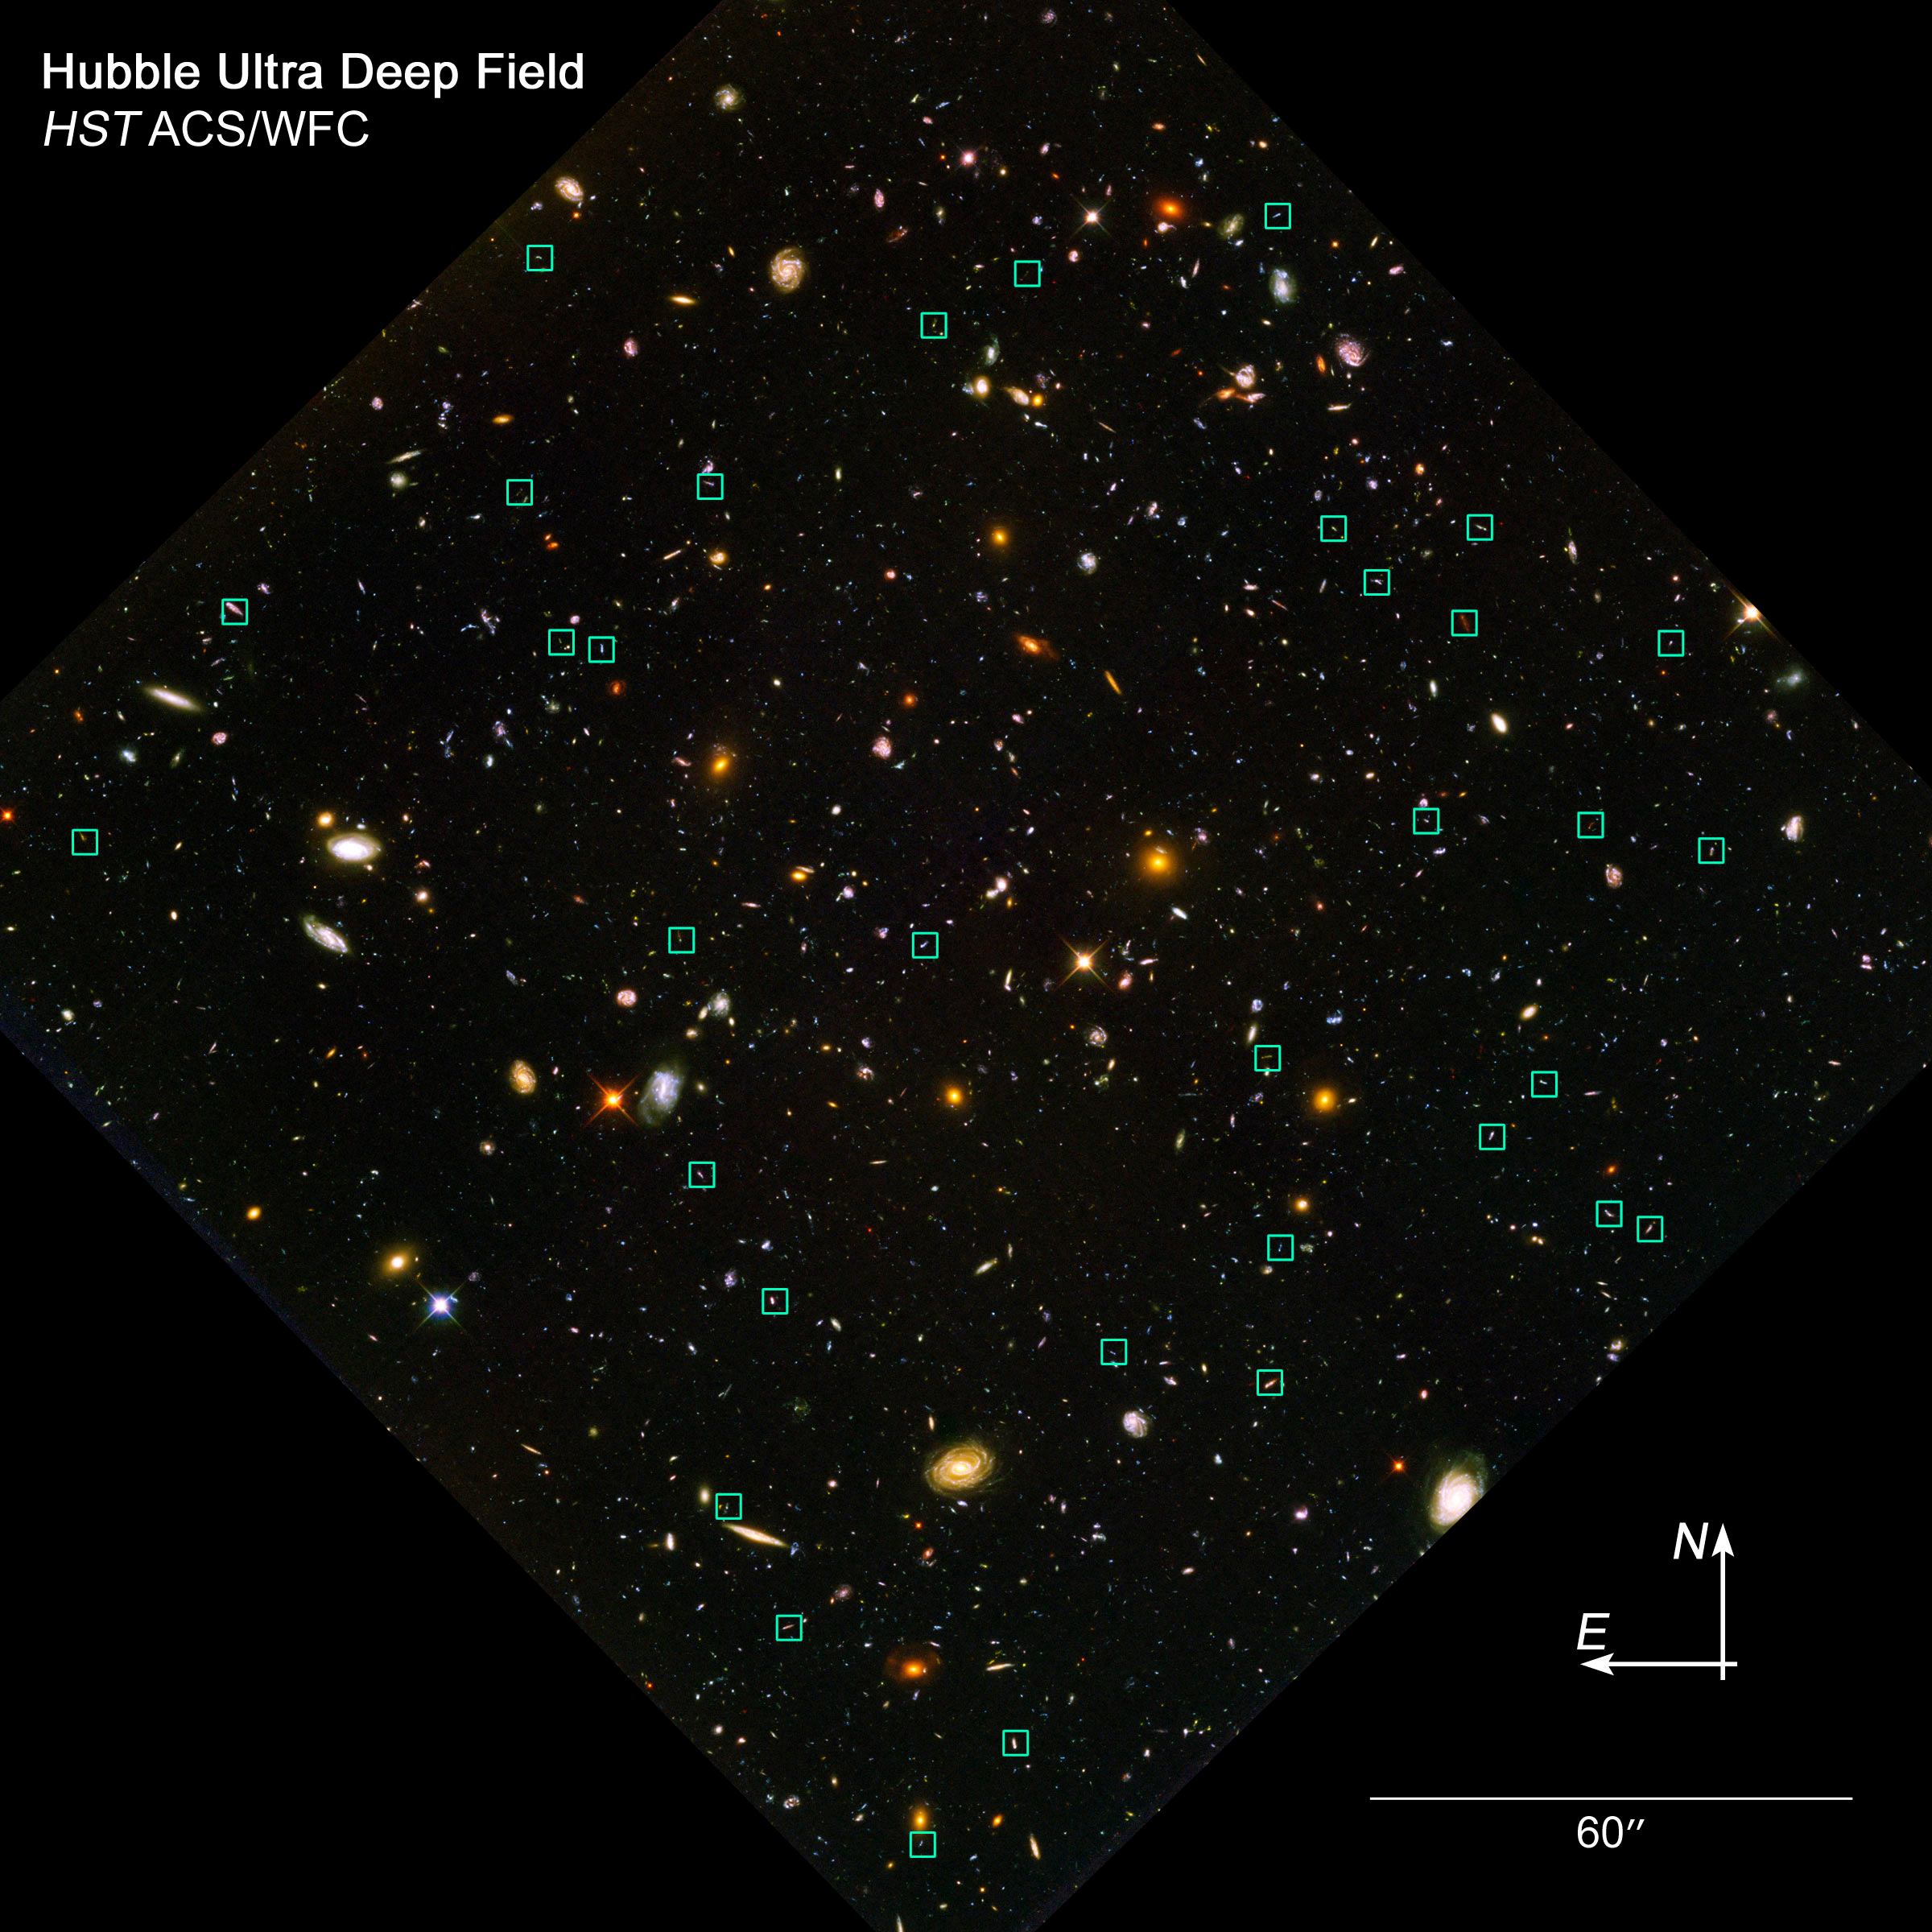

Locate the 'Tadpole' Galaxies

Among the thousands of galaxies in this image of the Hubble Ultra Deep Field are the 36 so-called "tadpole" galaxies identified recently by astronomers. The green squares mark these galaxies, which existed billions of years ago. They are called tadpoles because of their distinct knot-and-tail shapes, which suggest that they are engaging in galactic mergers.

Credit: NASA, ESA, and Z. Levay (STScI)